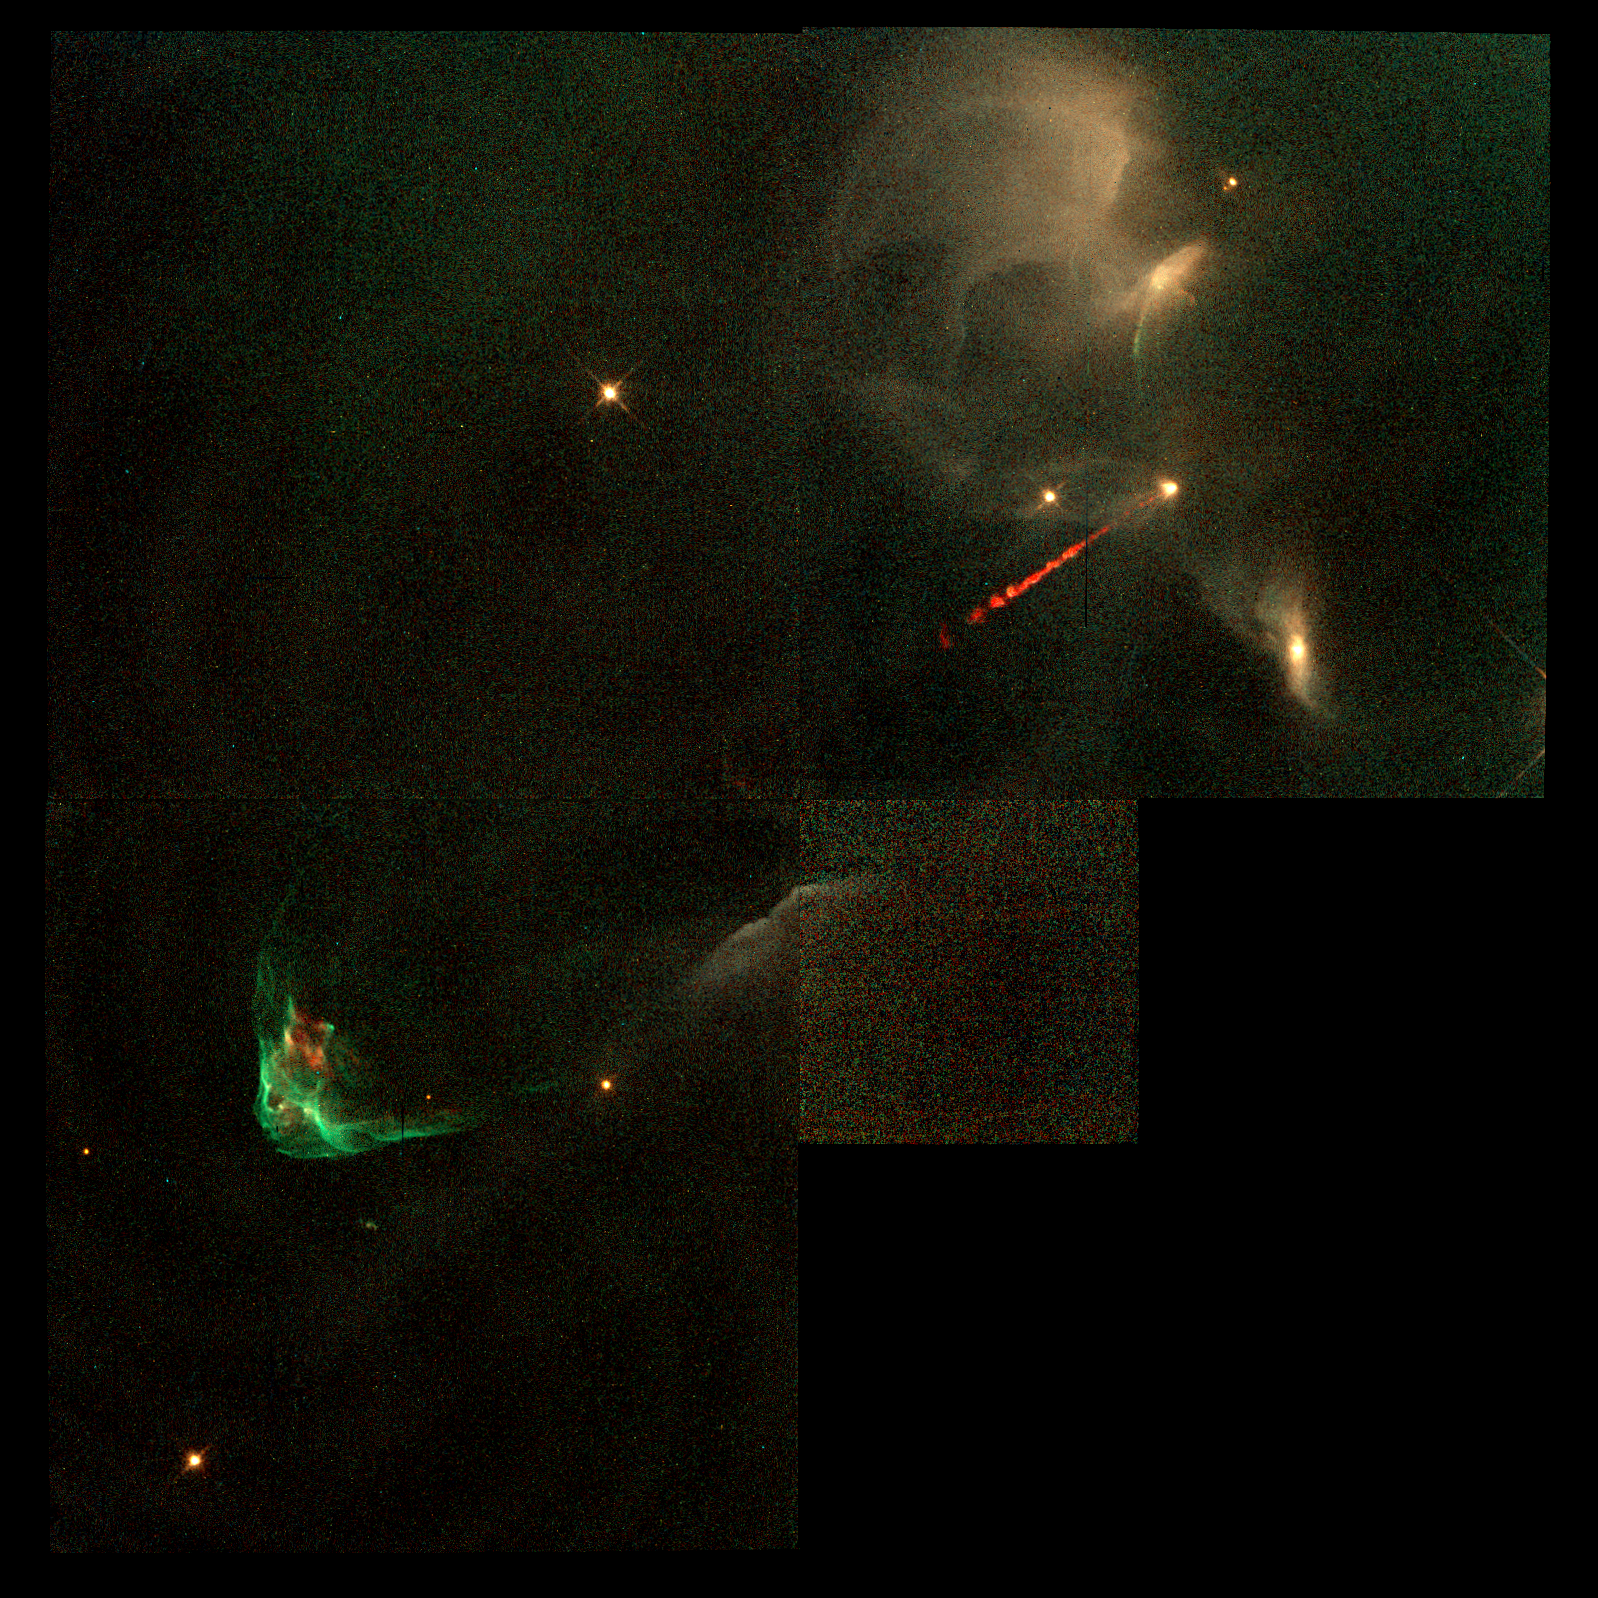

Jets from Young Stars

Astronomers glimpse a detailed look at the fitful, eruptive, and dynamic processes accompanying the final stages of a star's "construction." NASA's Hubble Space Telescope images provide a dramatically clear look at collapsing circumstellar disks of dust and gas that build stars and provide the ingredients for a planetary system. The pictures also show blowtorch-like jets of hot gas funneled from deep within several embryonic systems and machine gun-like bursts of material fired from the stars at speeds of a half-million mph. The Hubble observations shed new light on one of modern astronomy's central questions: How do tenuous clouds of interstellar gas and dust make stars like our Sun.

Credit: J. Hester (Arizona State University), the WFPC 2 Investigation Definition Team, and NASA